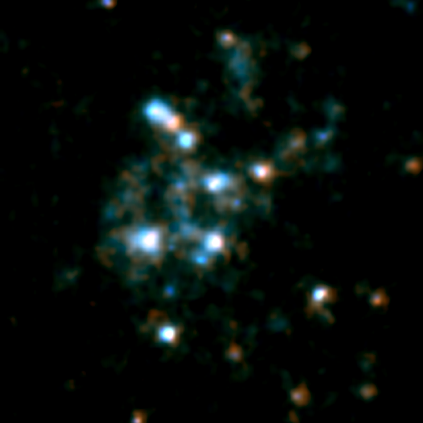

Blow-up of area around GRB 980425 (enlarged version)

This is an enlargement of a combined image obtained with the Space Telescope Imaging Spectrograph (STIS) onboard the NASA/ESA Hubble Space Telescope through a clear filter (shown in blue) and a red filter (shown in red). The region shows the star-formation taking place around the gamma-ray burst region in the galaxy ESO 184-G82.

At the exact position of the gamma-ray burst (marked with lines on the lower right image) a very compact source of emission is seen. Most of this emission is probably the last remnant of the fading light from the supernova itself, but the scientists suspect that a faint underlying star cluster may contribute as well.

Credit: ESA, Stephen Holland (Danish Centre for Astrophysics with the HST), Jens Hjorth, Johan Fynbo (University of Copenhagen)